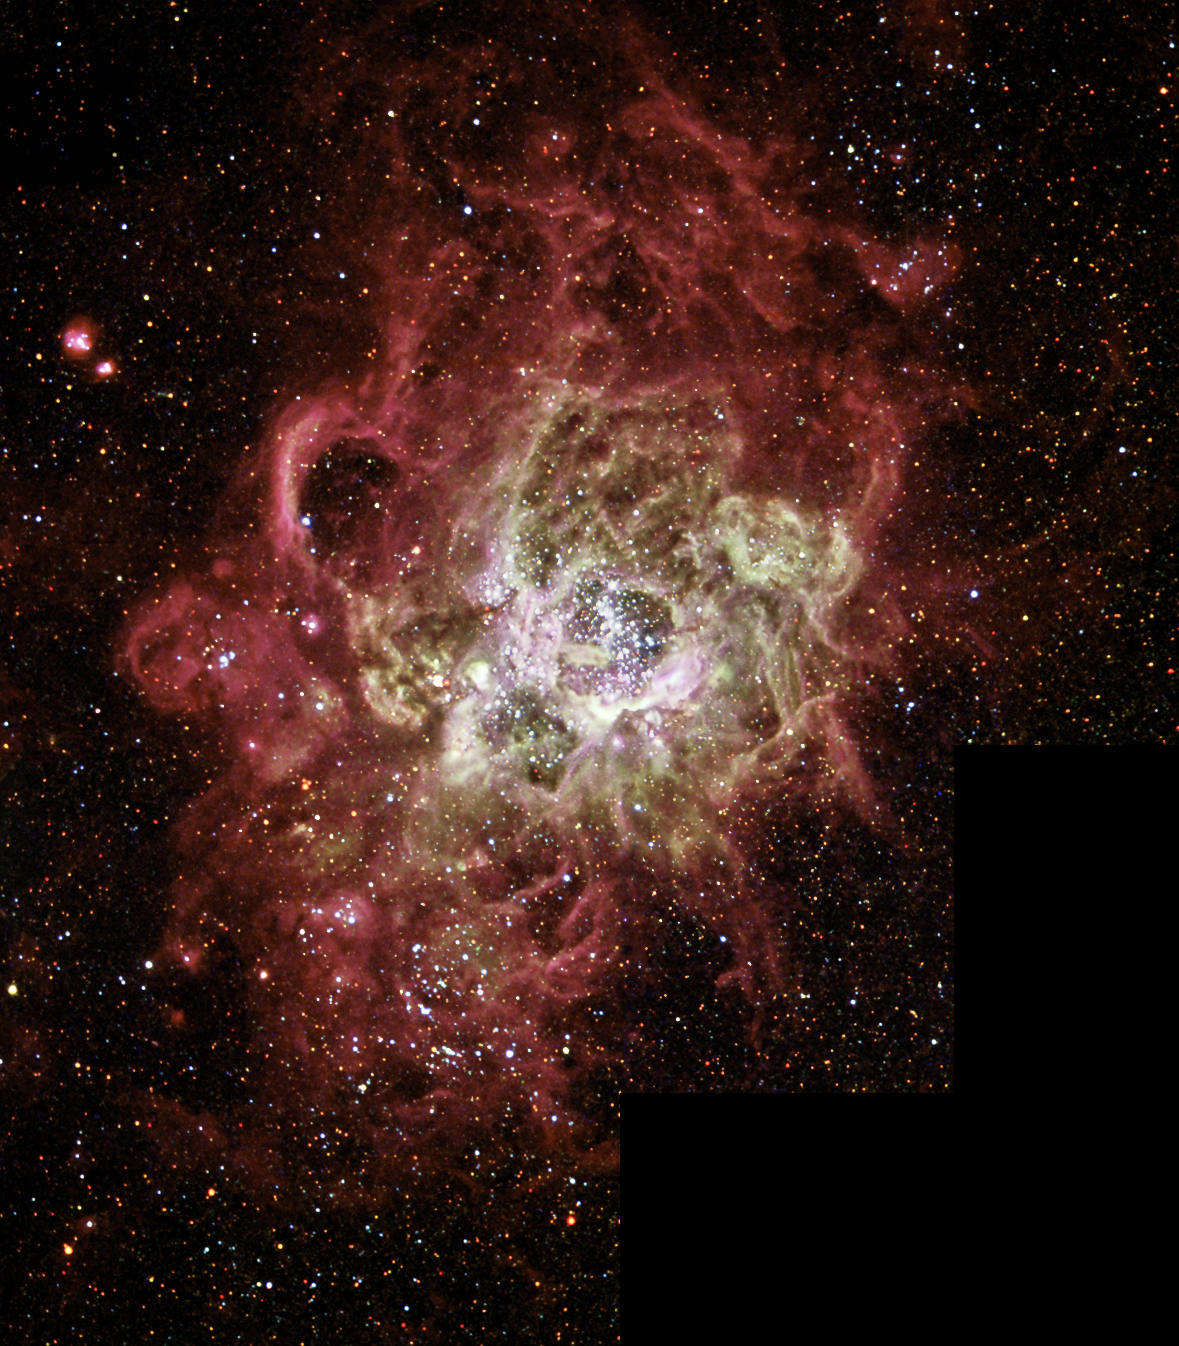

Firestorm of star birth seen in a Local Galaxy

This festively colorful nebula, called NGC 604, is one of the largest known seething cauldrons of star birth in a nearby galaxy. NGC 604 is similar to familiar star-birth regions inour Milky Way galaxy, such as the Orion Nebula, but it is vastlylarger in extent and contains many more recently formed stars.

This monstrous star-birth region contains more than 200 brilliant blue stars within a cloud of glowing gases some 1,300 light-year sacross, nearly 100 times the size of the Orion Nebula. By contrast,the Orion Nebula contains just four bright central stars. The bright stars in NGC 604 are extremely young by astronomical standards, having formed a mere 3 million years ago.

Credit: NASA/ESA and The Hubble Heritage Team (AURA/STScI)